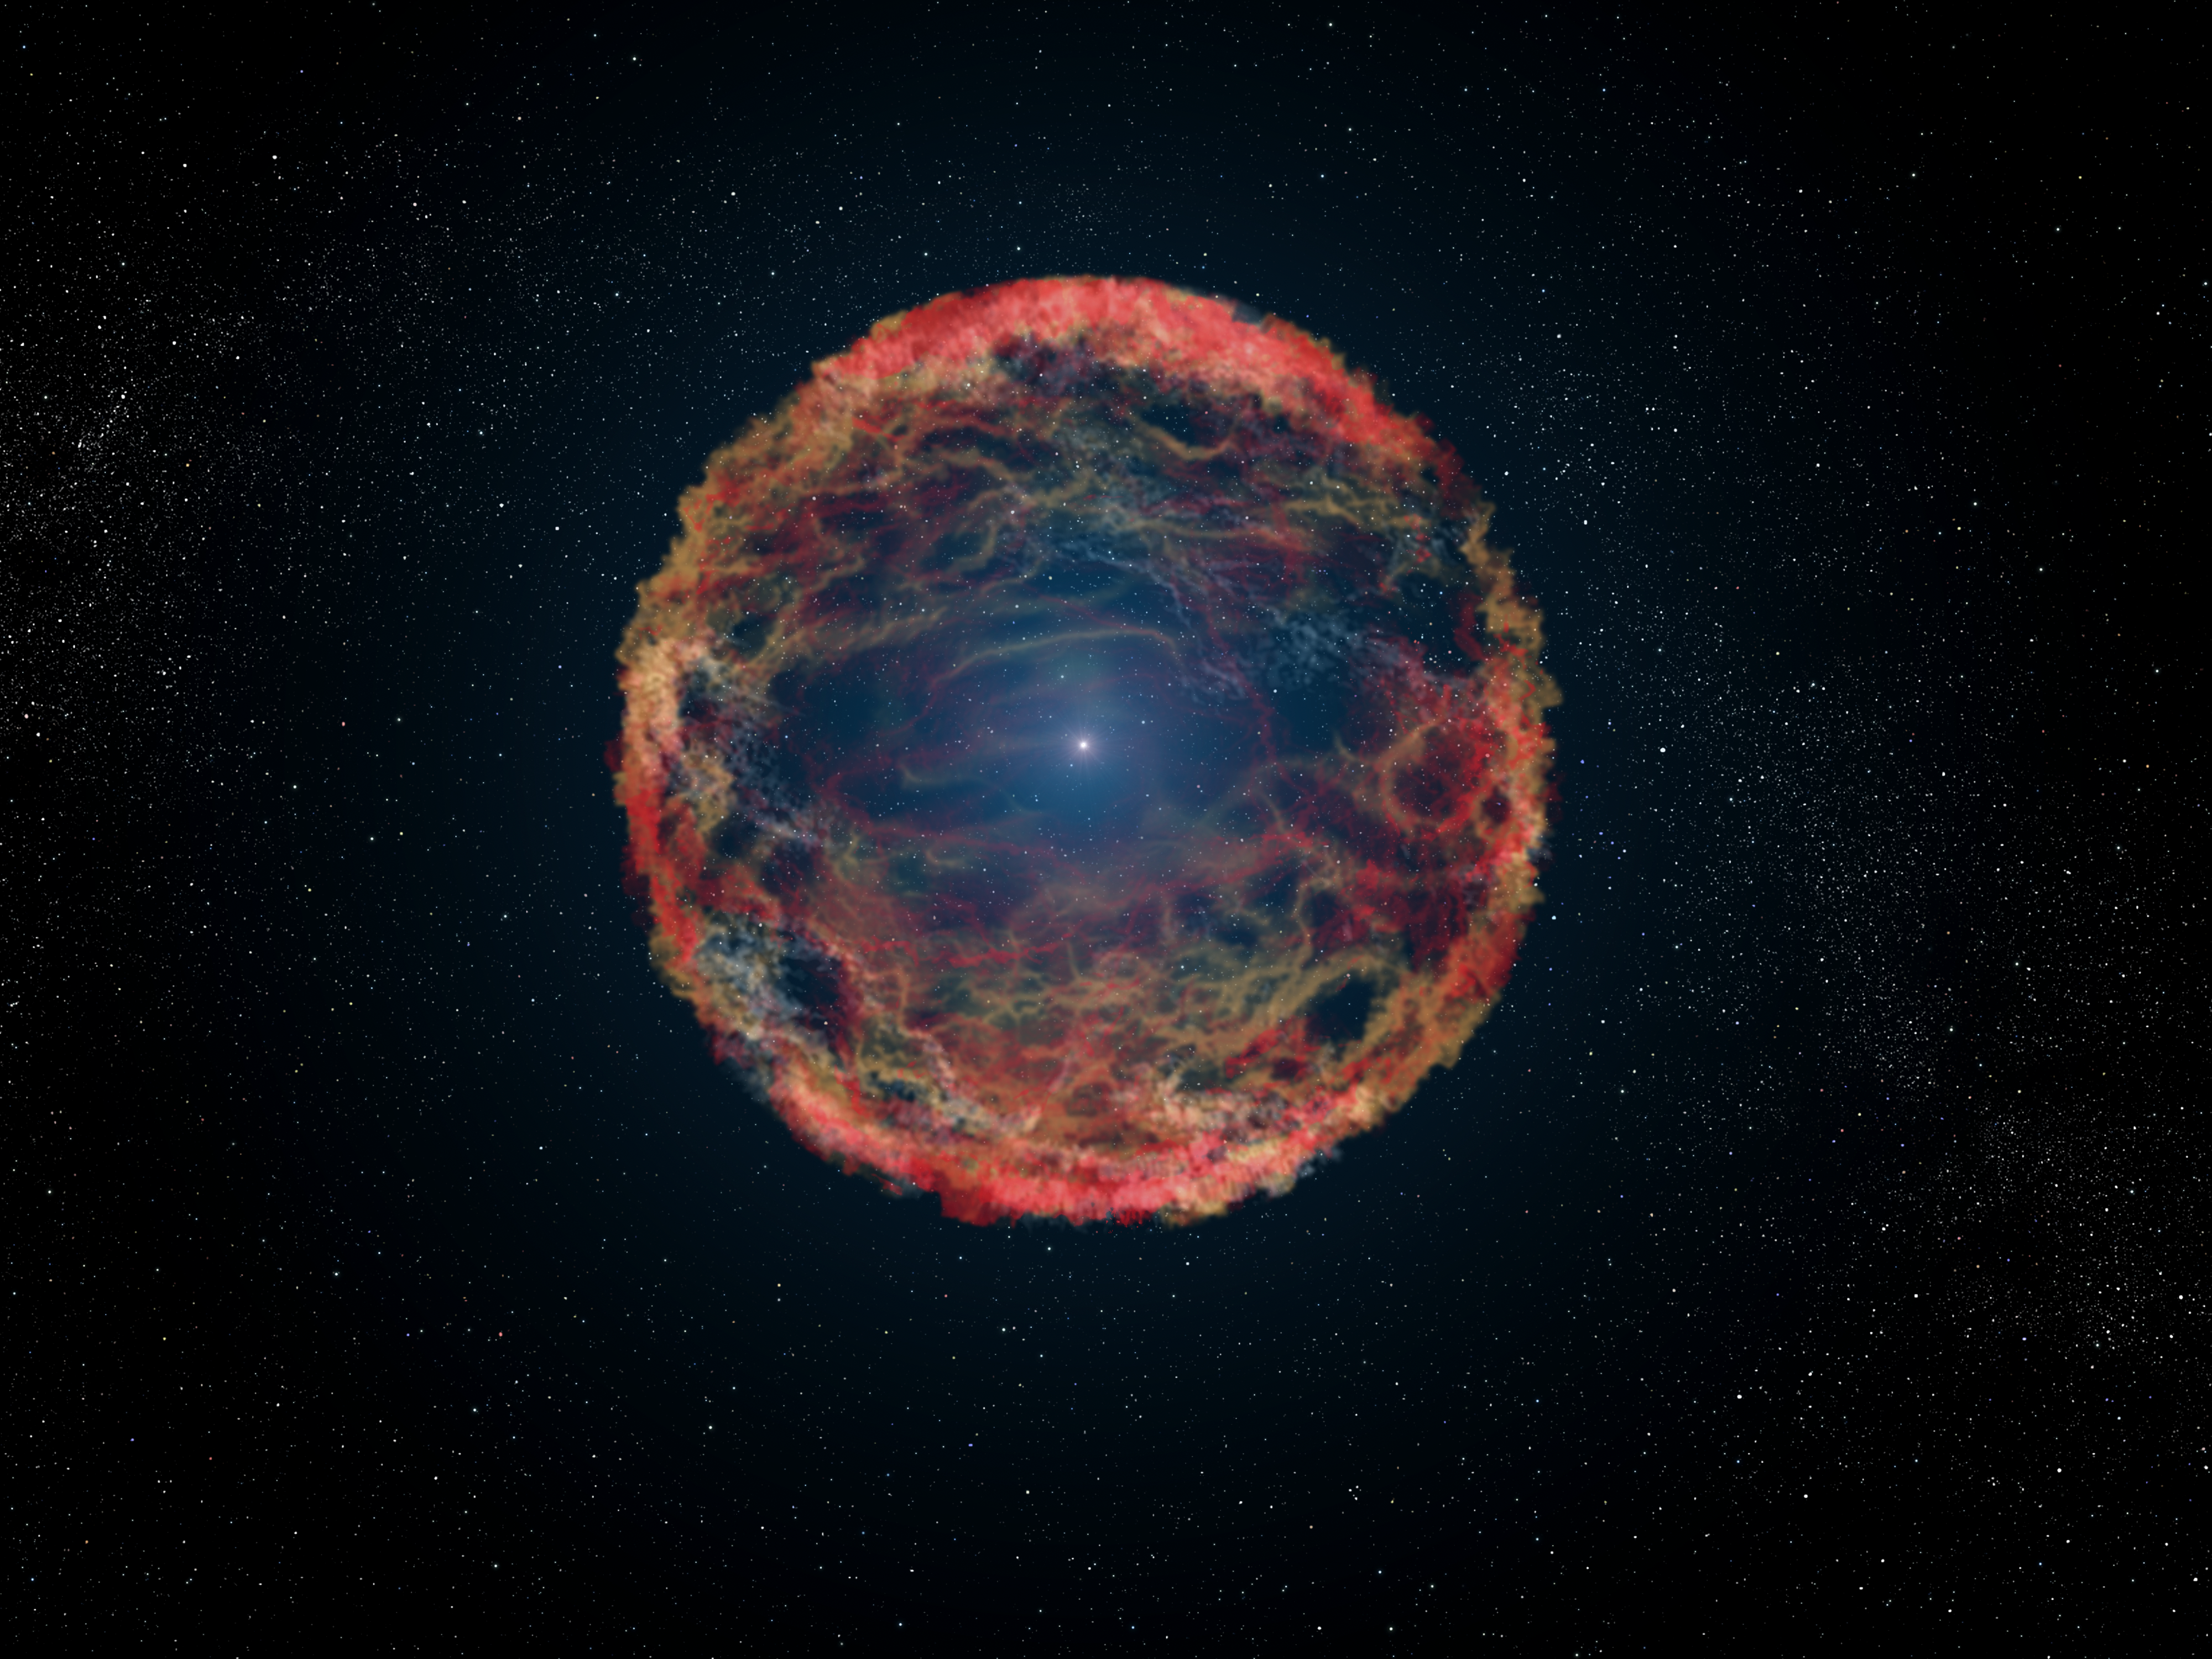

Artist's impression of supernova 1993J

This is an artist's impression of supernova 1993J, an exploding star in the galaxy M81 whose light reached us 21 years ago. The supernova originated in a double-star system where one member was a massive star that exploded after siphoning most of its hydrogen envelope to its companion star. After two decades, astronomers have at last identified the blue helium-burning companion star, seen at the center of the expanding nebula of debris from the supernova. The NASA/ESA Hubble Space Telescope identified the ultraviolet glow of the surviving companion embedded in the fading glow of the supernova.

Credit: NASA, ESA, and G. Bacon (STScI)